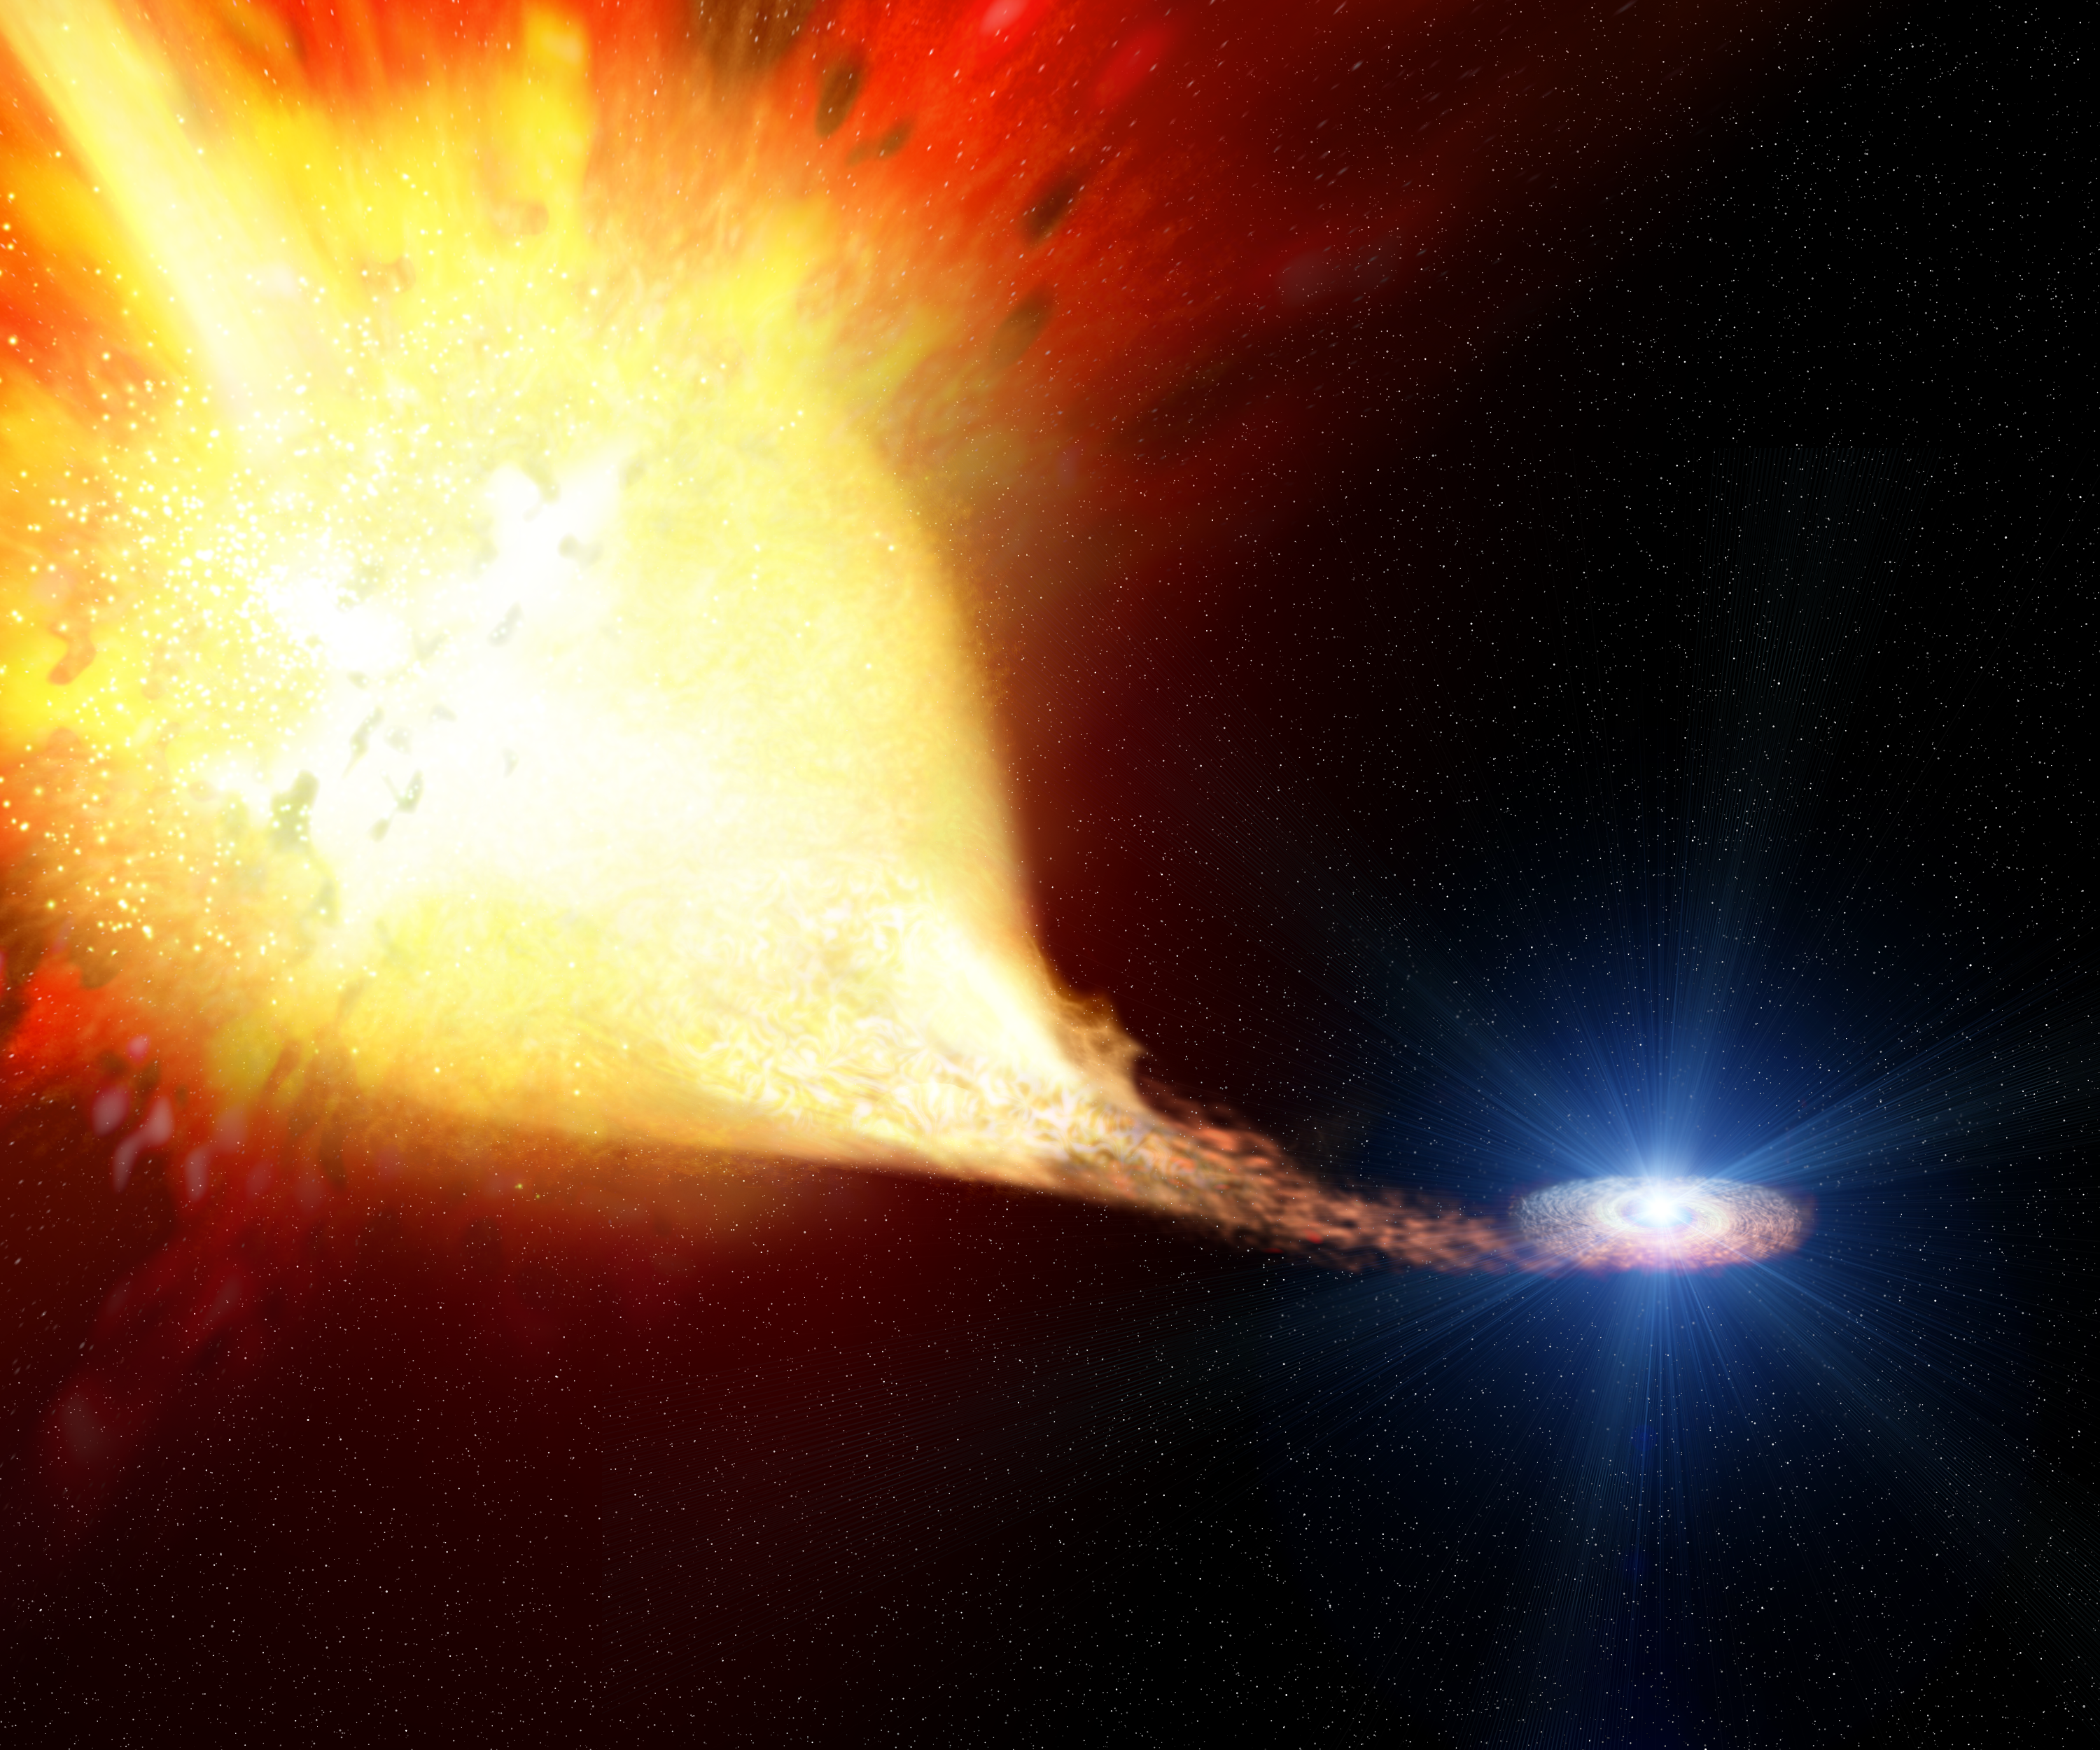

Supernova 1993J exploding (artist's impression)

New observations with the Hubble Space Telescope allow a look into a supernova explosion under development. In this artist's view the red supergiant supernova progenitor star (left) is exploding after having transferred about 10 solar masses of hydrogen gas to the blue companion star (right). This interaction process happened over about 250 years and affected the supernova explosion to such an extent that SN 1993J was later known as one of the most peculiar supernovae ever seen.

Credit: ESA and Justyn R. Maund (University of Cambridge)